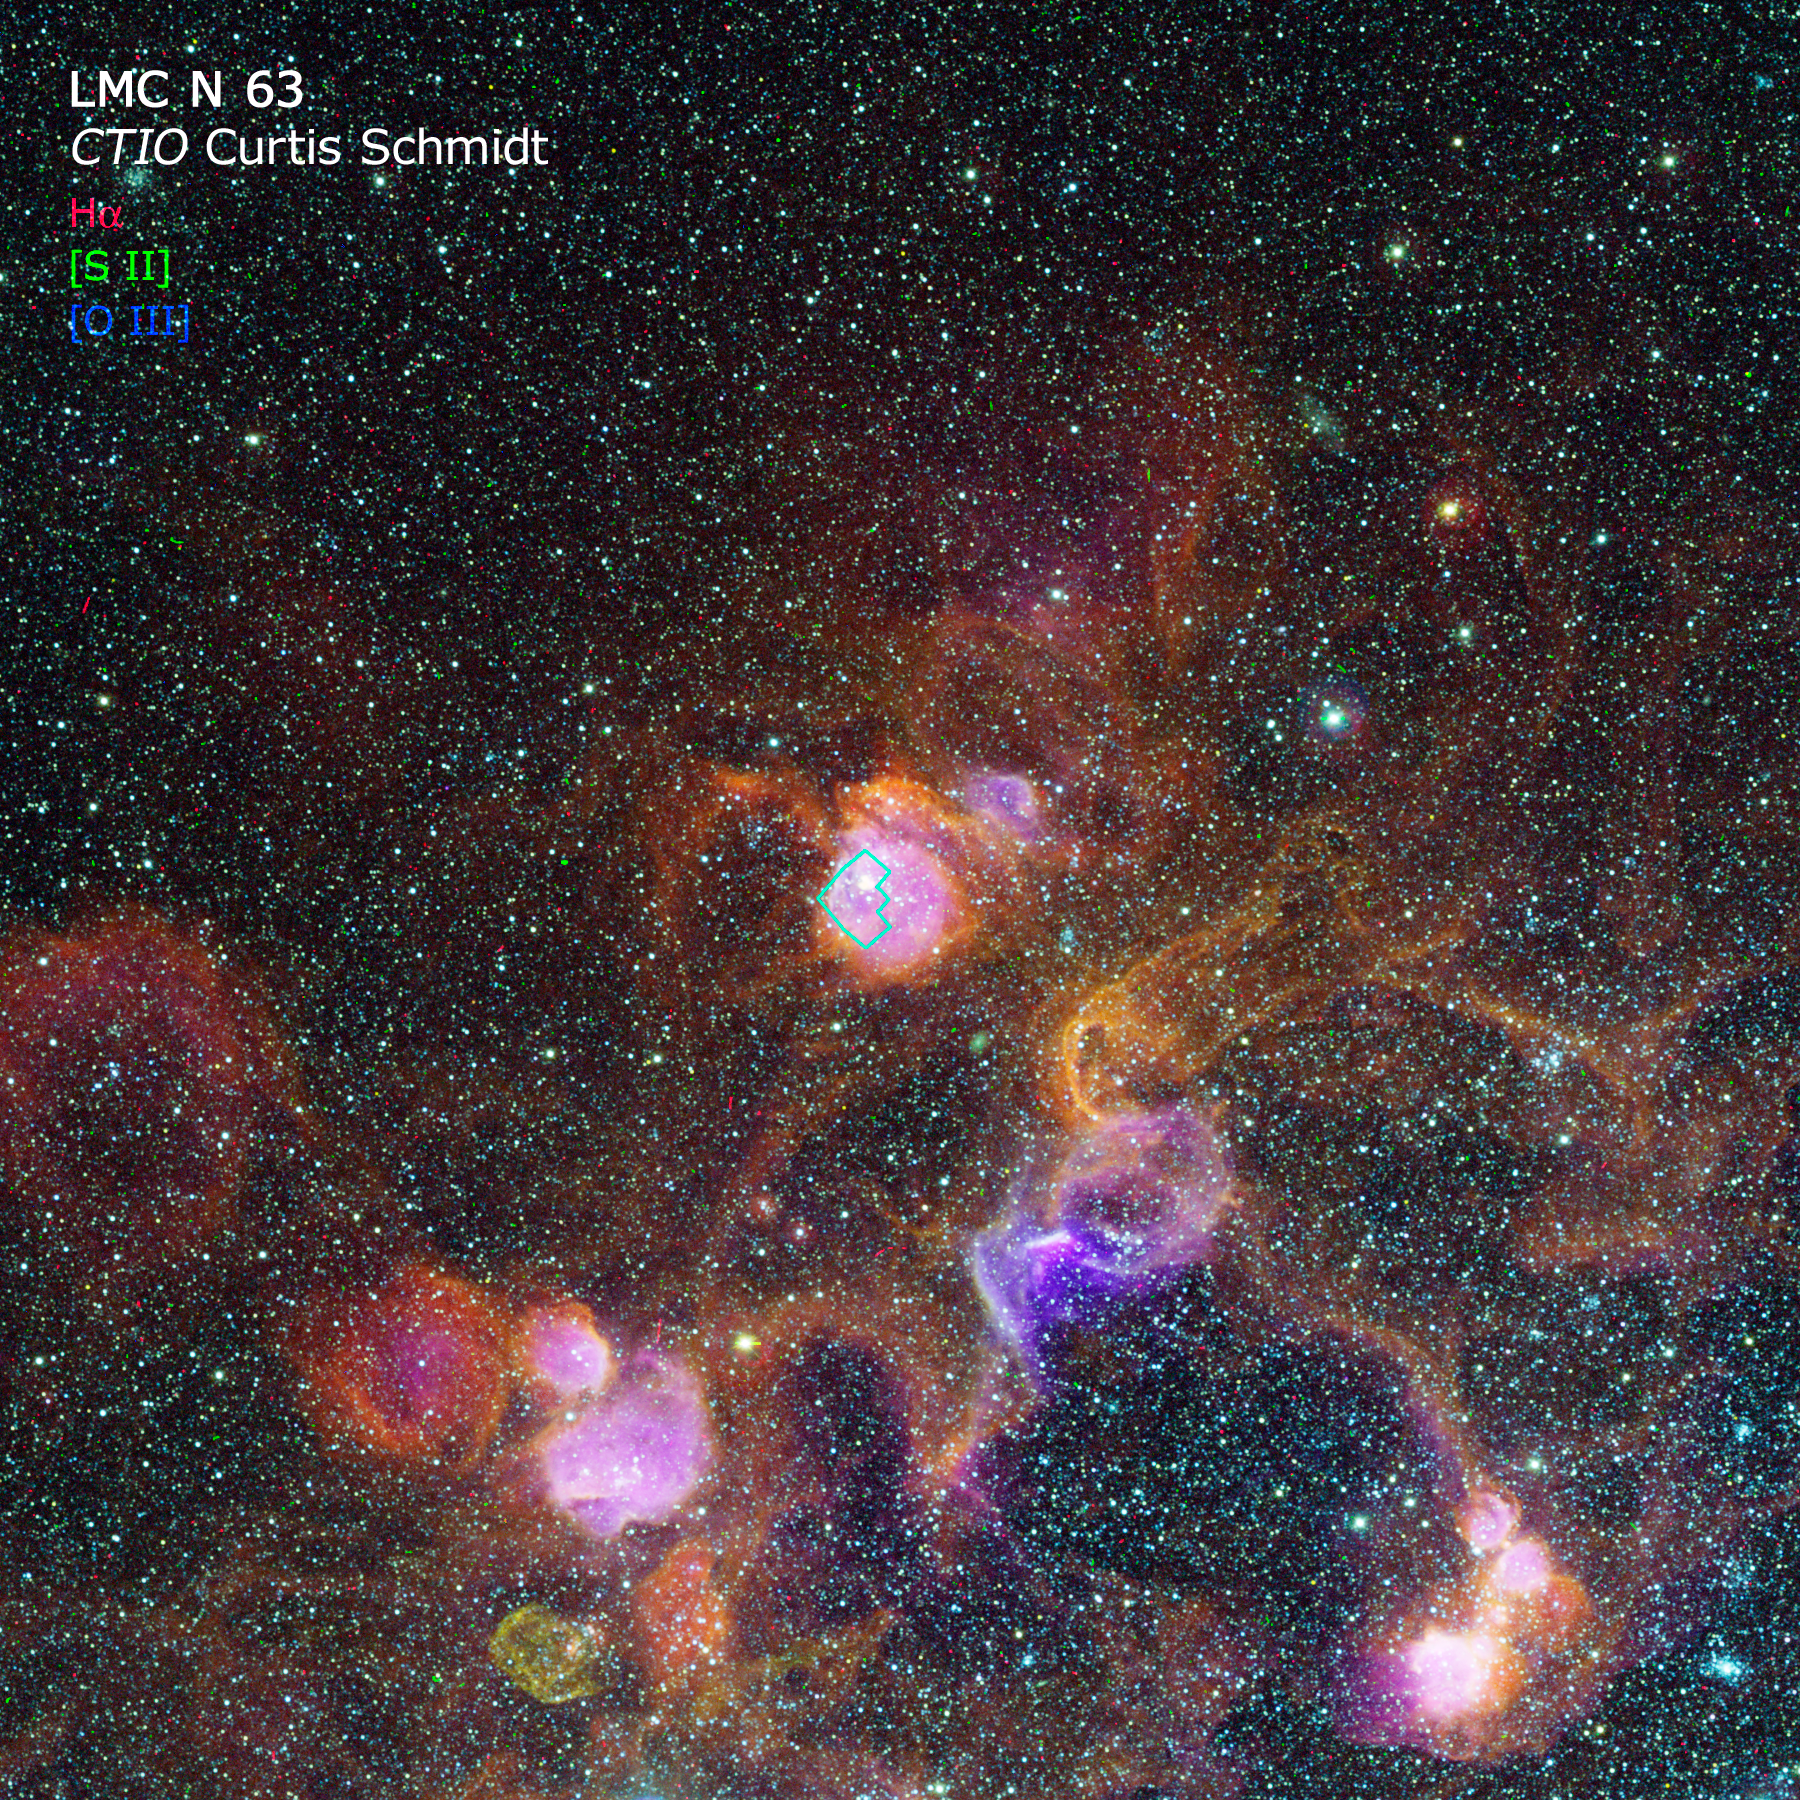

CTIO image of a portion of the LMC-4 superbubble

An image of the Supergiant Shell LMC-4 in the Large Magellanic Cloud, taken with the Curtis Schmidt telescope at Cerro Tololo Inter-American Observatory (CTIO) as part of the Magellanic Clouds Emission Line Survey (MCELS).

Credit: S. Points, C. Smith, R. Leiton, and C. Aguilera/NOAO/AURA/NSF and Z. Levay (STScI)